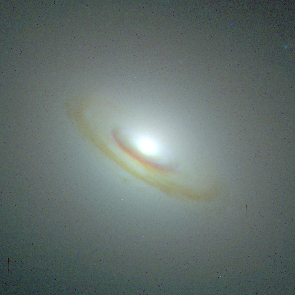

Central Bulges of Spiral Galaxies - NGC 5838 (Hubble NICMOS and WFPC2 View)

Composite picture of spiral galaxy NGC 5838 from Hubble's visible- and infrared-light cameras, the Wide Field and Planetary Camera 2 (WFPC2) and the Near Infrared Camera and Multi-Object Spectrometer(NICMOS). Astronomers combined views from both cameras to obtain the true ages of the stars surrounding the galaxy's bulge. The Hubble telescope's sharper resolution allows astronomers to study the intricate structure of a galaxy's core.

Credit: NASA, ESA, and Reynier Peletier (University of Nottingham, United Kingdom)